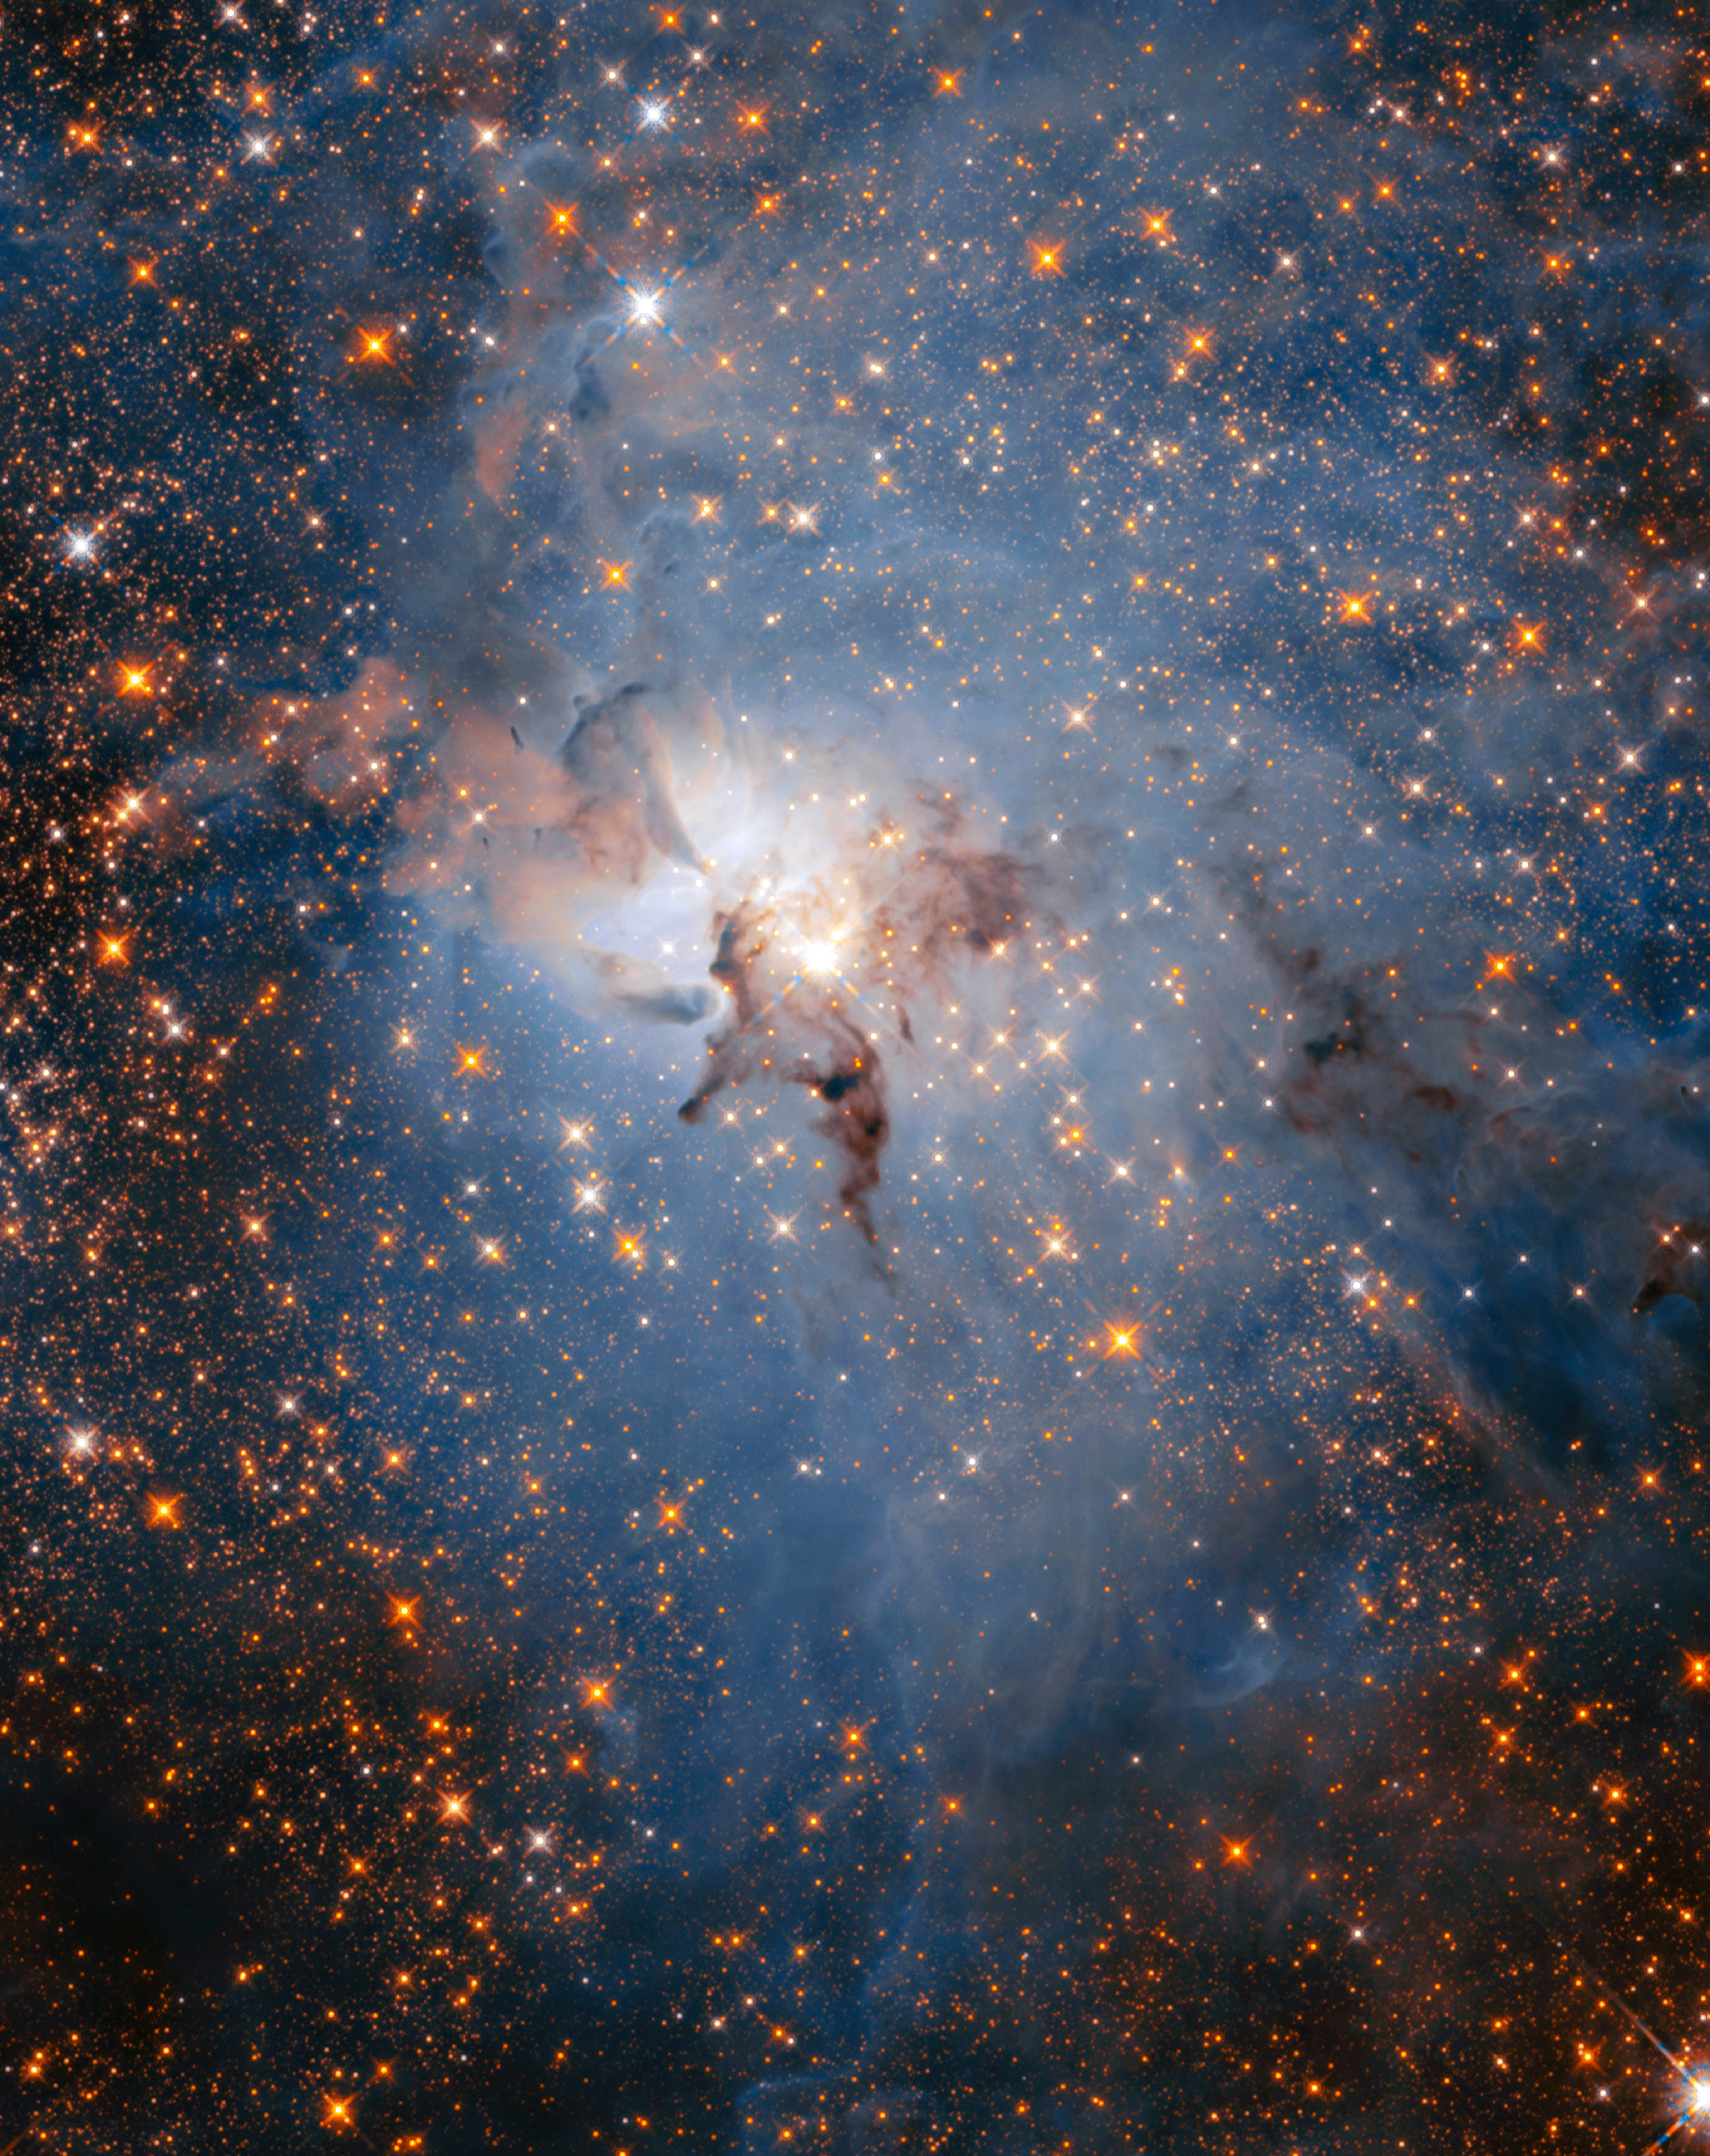

Infrared view of the Lagoon Nebula

To celebrate its 28th anniversary in space the NASA/ESA Hubble Space Telescope took this amazing and colourful image of the Lagoon Nebula. Using its infrared capabilities, the telescope was able to peer through the thick clouds of dust and gas.

The most obvious difference between Hubble’s infrared and visible images of this region is the abundance of stars that fill the field of view in the infrared. Most of them are more distant, background stars located behind the nebula. However, some of them are young stars within the Lagoon Nebula itself.

Credit: NASA, ESA, STScI